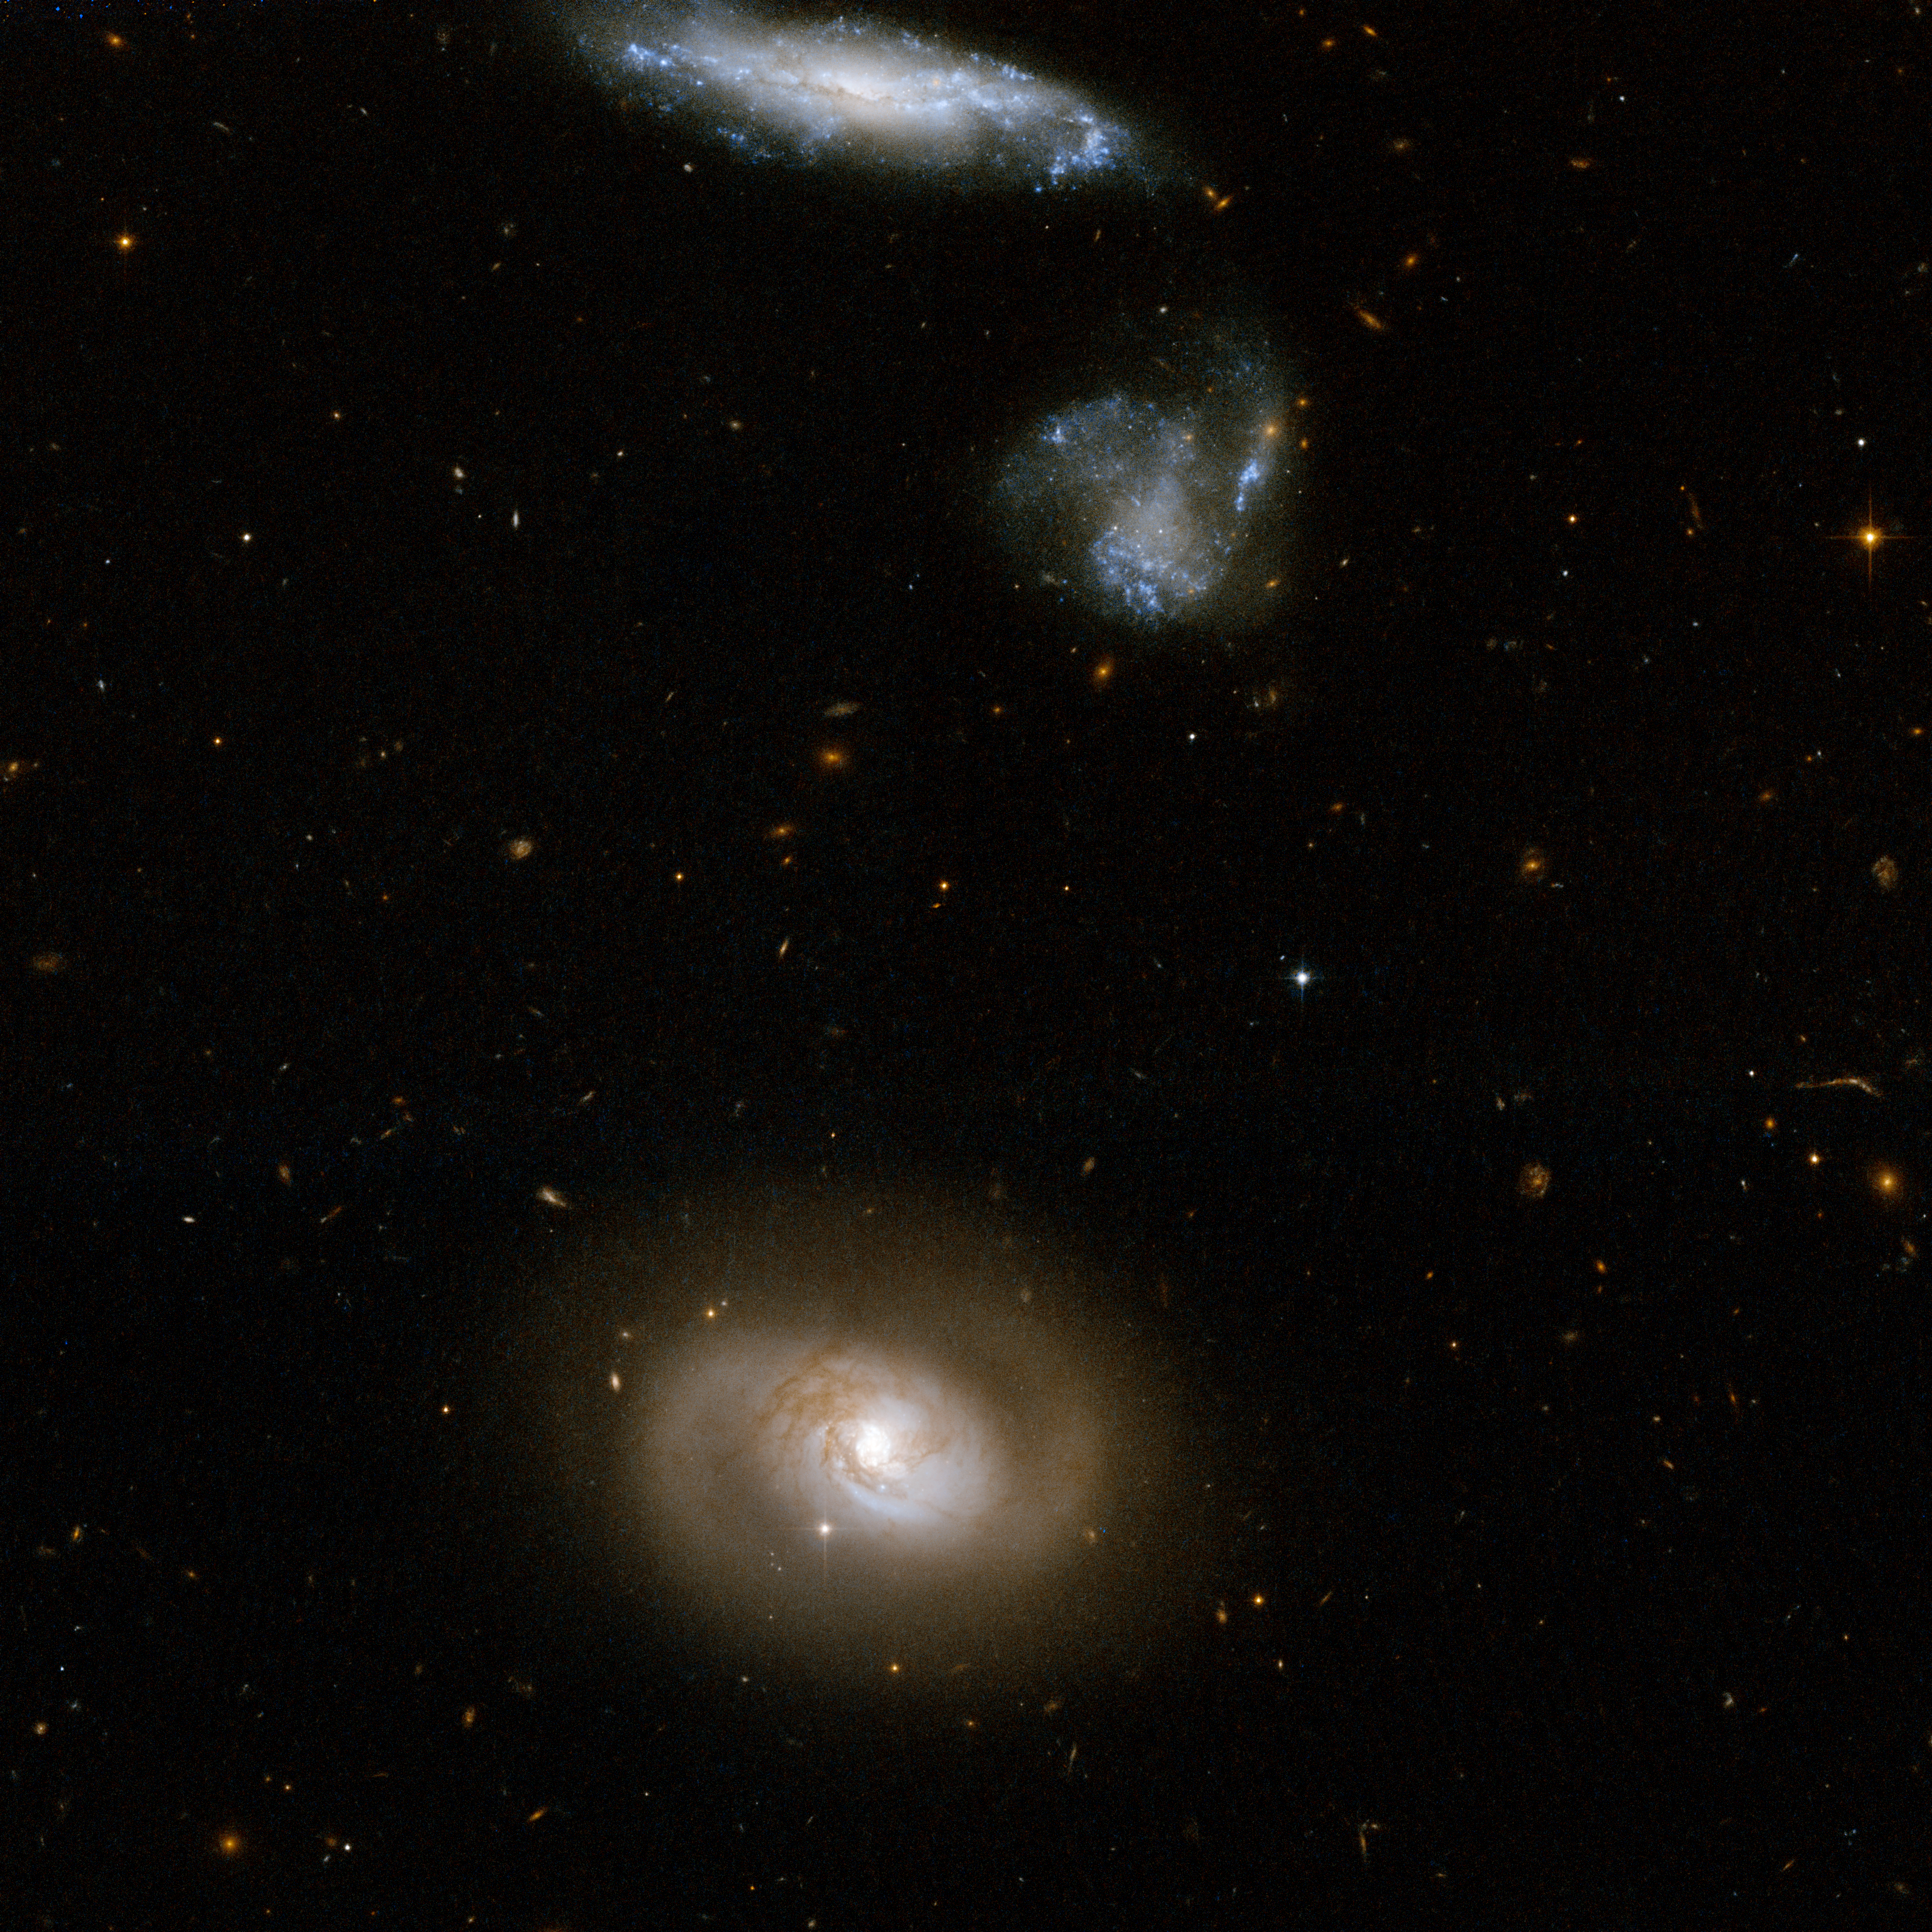

UGC 12812

UGC 12812, also known as Markarian 331, is a spiral galaxy with no obvious tidal tails. It is located in the lower part of the Hubble image. Two neighbouring blue galaxies are seen at the top of the frame. The galaxy at the very top is embellished by a remarkable number of blue star knots. Observations point to the presence of a giant black hole anchored at the centre of the bright core of UGC 12812. The galaxy produces 80 solar masses of new stars on average every year. It is an open question whether Markarian 331 is actually a merging system or whether its infrared brightness stems from another process. UGC 12812 is located in the constellation of Pegasus, the Winged Horse, about 250 million light-years away from Earth.

This image is part of a large collection of 59 images of merging galaxies taken by the Hubble Space Telescope and released on the occasion of its 18th anniversary on 24th April 2008.

Credit: NASA, ESA, the Hubble Heritage Team (STScI/AURA)-ESA/Hubble Collaboration and A. Evans (University of Virginia, Charlottesville/NRAO/Stony Brook University)